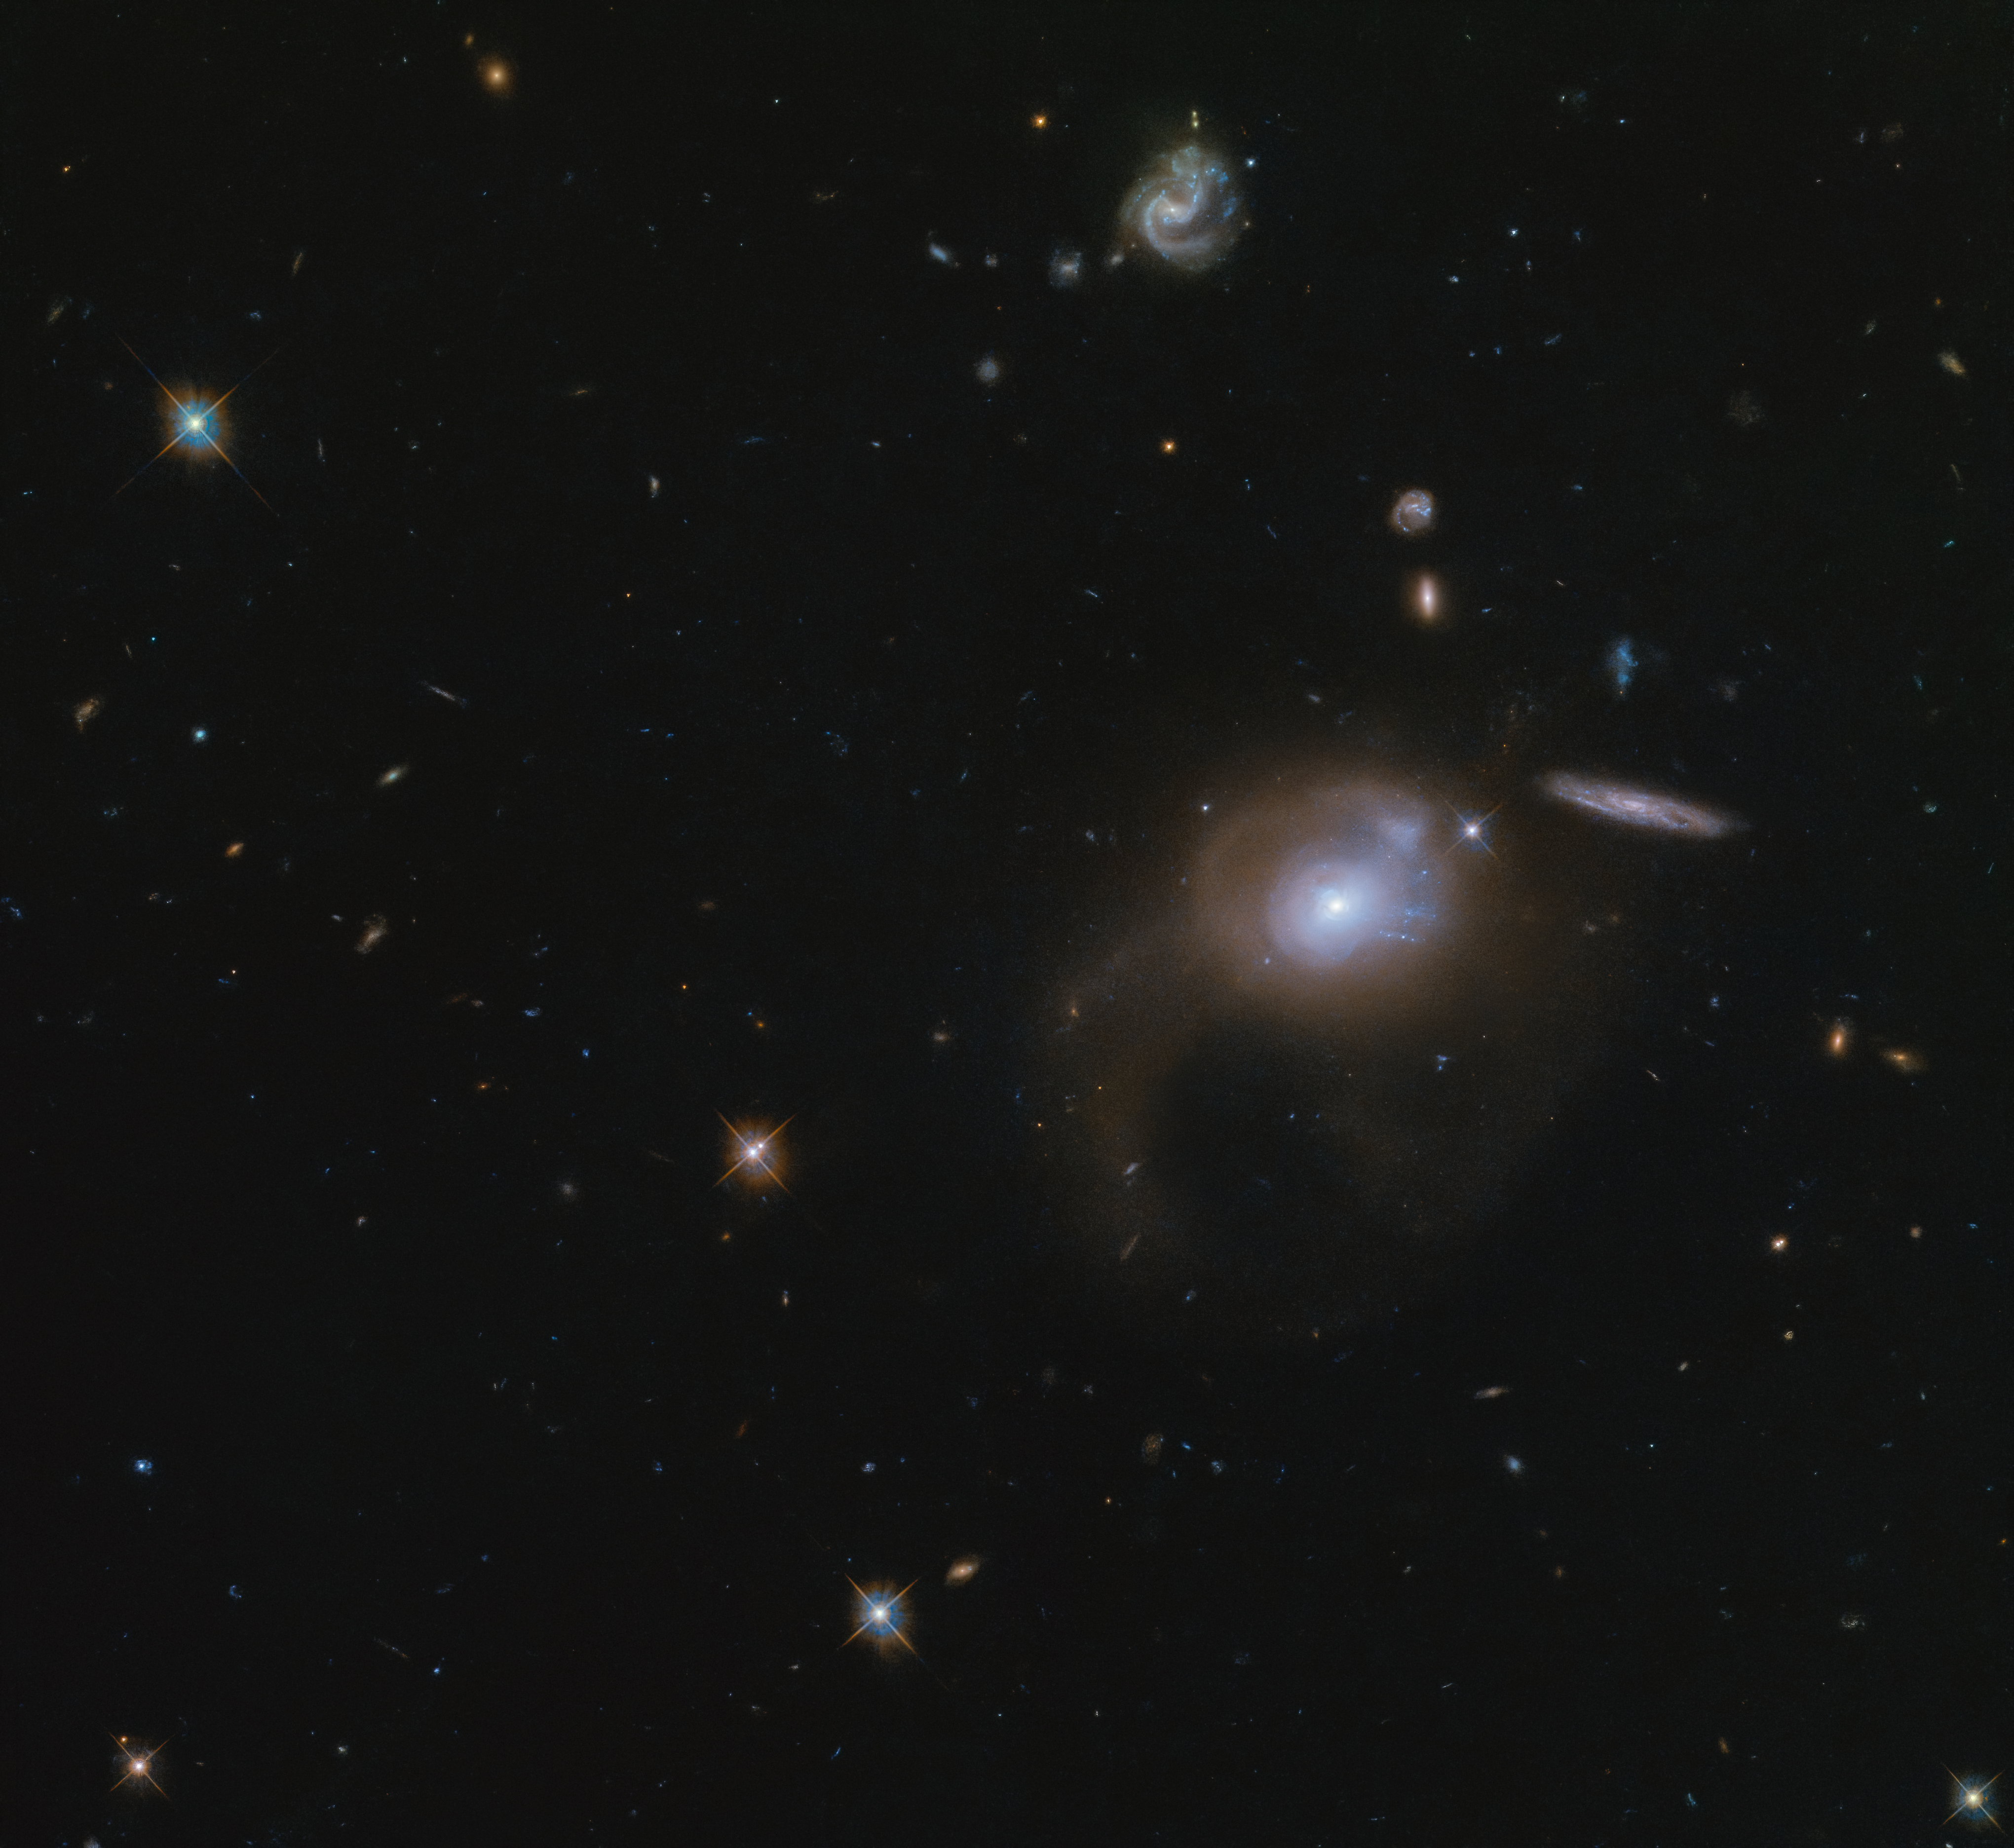

Cosmic Wonderland

This large expanse of space captured with the Hubble Space Telescope features the galaxy SDSSJ225506.80+005839.9. Unlike many other extravagant galaxies and stunning nebulae imaged by Hubble, this galaxy does not have a short popular name, and is only known by its long SDSS name, which refers to its coordinates in the sky. This galaxy - visible in the center right portion of the image - and its many wondrous neighbouring galaxies lie in the constellation of Pisces (The Fish).

This is a post-starburst galaxy, which is a product of galaxies that have merged within the past billion years. This merger event drove gas to the galaxy's center and created an abundance of new stars, of which the brightest are visible in the remnant galaxy's core. The visible shells and tails surrounding the galaxy are also a result of this merger event.

Residing far beyond our own Milky Way, it is almost impossible to glimpse this galaxy without the assistance of Hubble, and, like thousands of similar faint and very distant galaxies, it was only discovered and catalogued in recent years. Many millions of galaxies still await our discovery as we build a wondrous picture of our night sky.

Credit: ESA/Hubble & NASA, A. Zabludoff